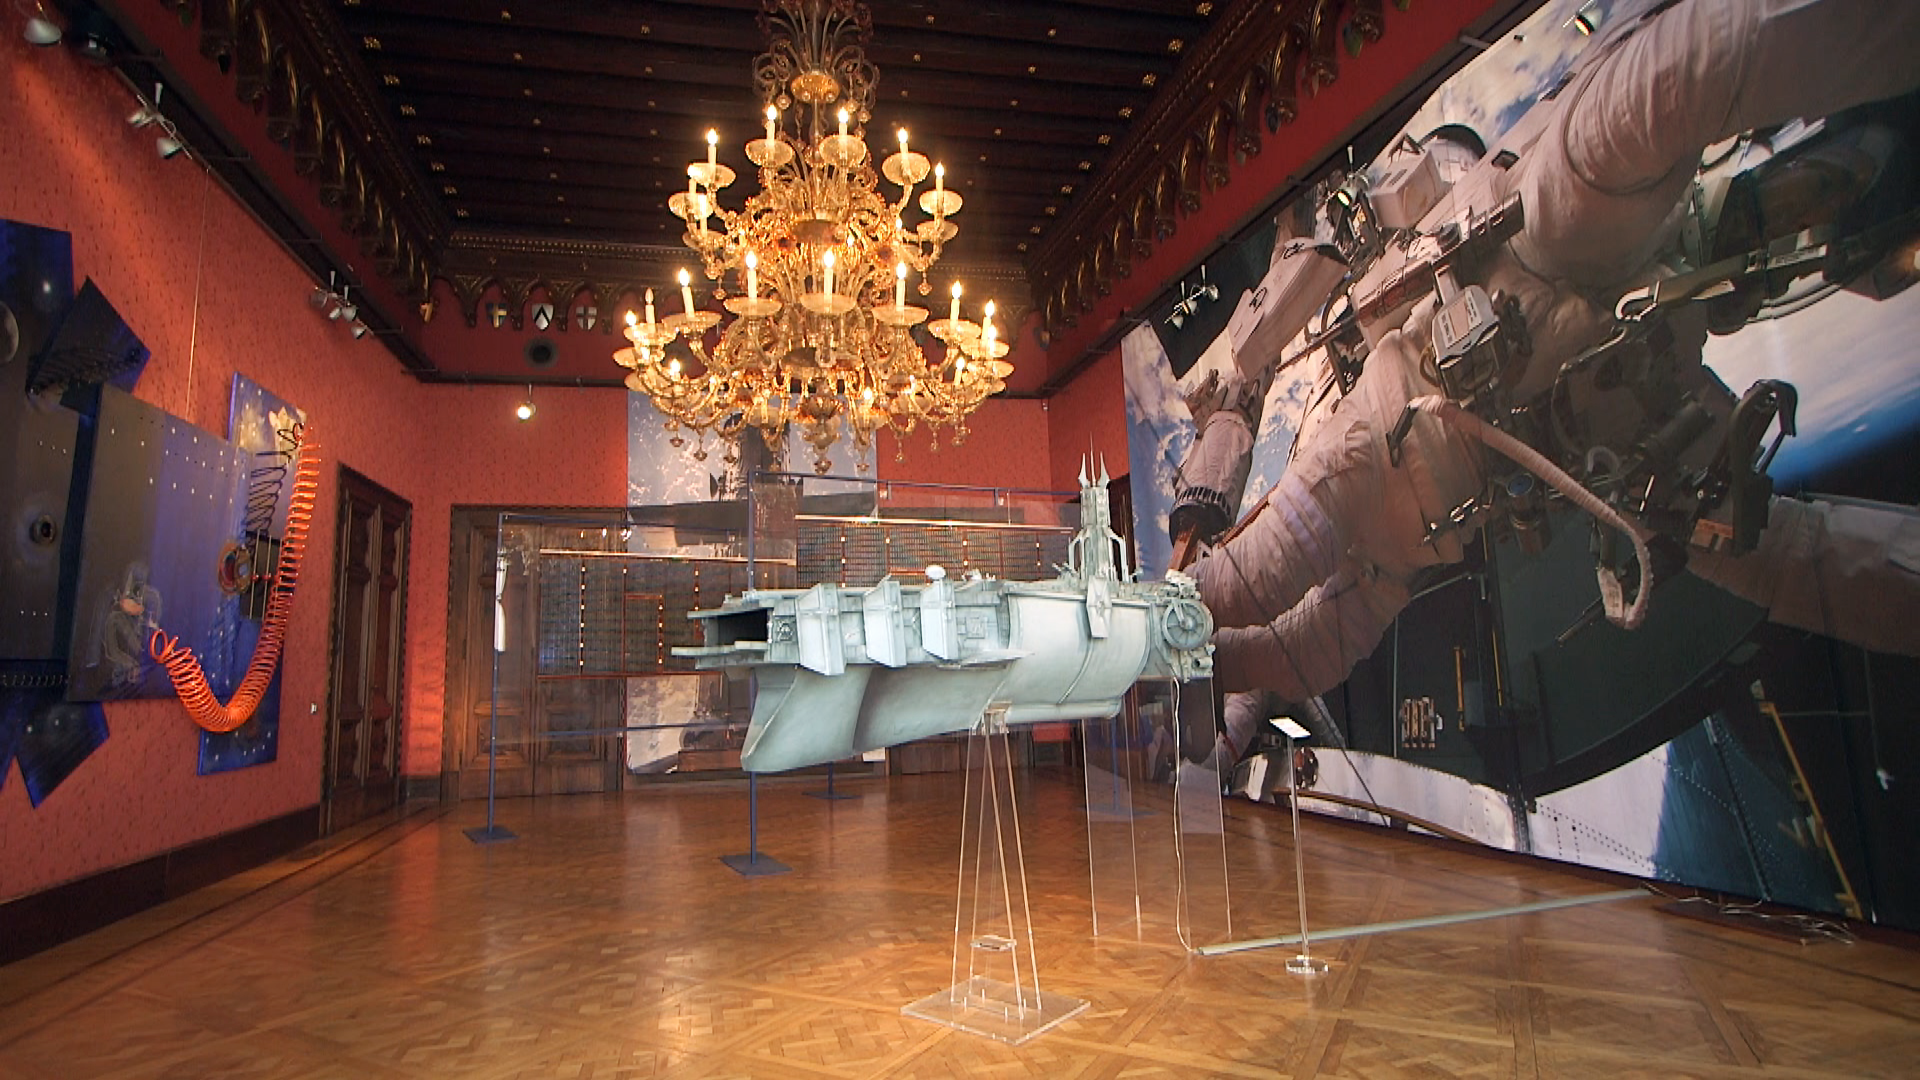

Still from Hubblecast 101: Our Place in Space

This is a still from Hubblecast 101.

Credit: ESA/Hubble, NASA